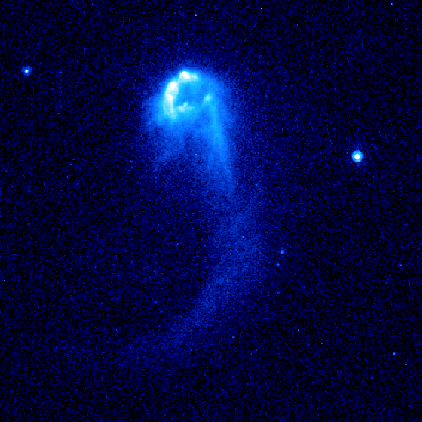

Hubble Image of Stellar Bow Shock (4 of 4)

Resembling a comet streaking across the sky this speedy star is plowing through a region of dense interstellar gas and creating a brilliant arrowhead structure and a trailing tail of glowing gas. The star is one of 14 young runaway stars spotted by the Advanced Camera for Surveys between October 2005 and July 2006.

Credit: NASA, ESA and R. Sahai (NASA's Jet Propulsion Laboratory)